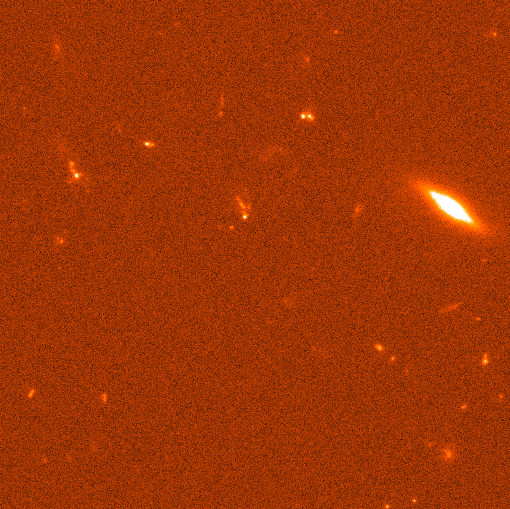

Gamma Ray Burst GRB990123

A NASA/ESA Hubble Space Telescope view of the rapidly fading visible-light fireball from the most powerful cosmic explosion recorded to date. For a brief moment the light from the blast was equal to the radiance of 100 million billion stars. The initial explosion began as an intense burst of gamma-rays which happened on Jan. 23, 1999.

The blast had already faded to one four-millionth of its original brightness when Hubble made observations on February 8 and 9. Space Telescope captured the fading fireball embedded in a galaxy located 2/3 of the way to the horizon of the observable universe.

Credit: Andrew Fruchter (STScI) and NASA/ESA